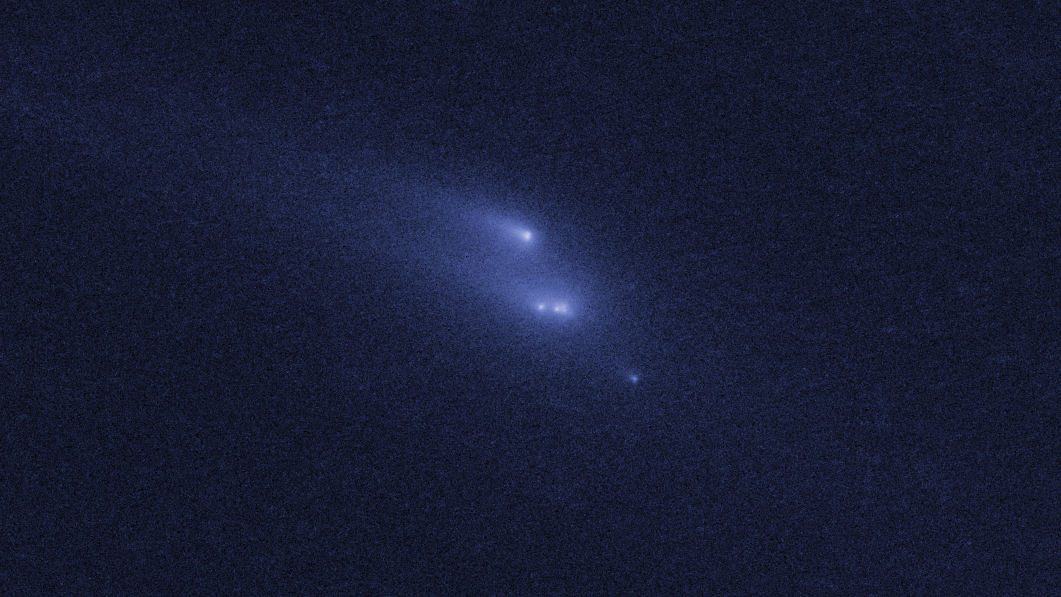

Disintegrating asteroid P/2013 R3 as viewed by Hubble on 15 November 2013

This image shows NASA/ESA Hubble Space Telescope observations of asteroid P/2013 R3. This asteroid has been found to be disintegrating and breaking apart — the first such body ever seen to do this.

This image shows P/2013 R3 as it was seen on 15 November 2013.

Credit: NASA, ESA, D. Jewitt (UCLA)